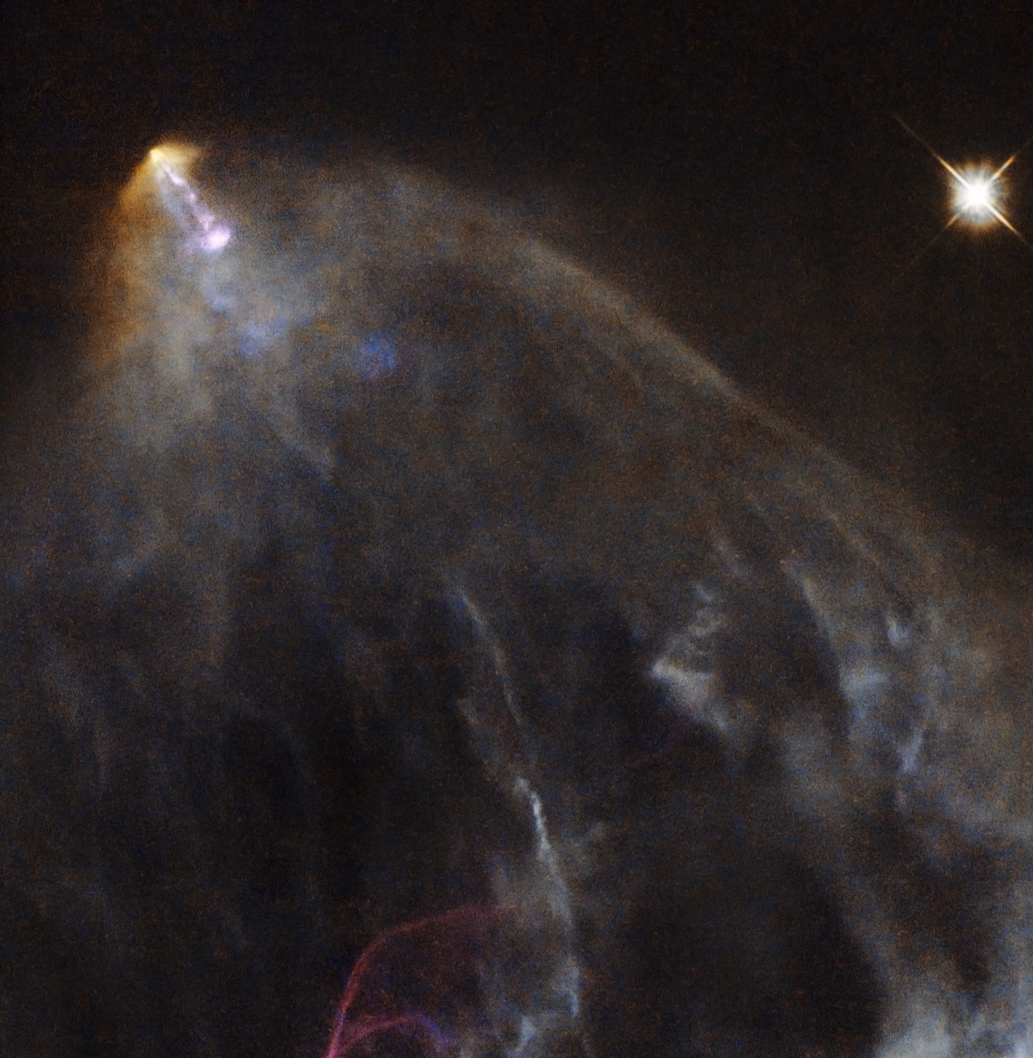

A glowing jet from a young star

This image shows an object known as HH 151, a bright jet of glowing material trailed by an intricate, orange-hued plume of gas and dust. It is located some 460 light-years away in the constellation of Taurus (The Bull), near to the young, tumultuous star HL Tau.

In the first few hundred thousand years of life, new stars like HL Tau pull in material that falls towards them from the surrounding space. This material forms a hot disc that swirls around the coalescing body, launching narrow streams of material from its poles. These jets are shot out at speeds of several hundred kilometres per second and collide violently with nearby clumps of dust and gas, creating wispy, billowing structures known as Herbig-Haro objects — like HH 151 seen in the image above.

Such objects are very common in star-forming regions. They are short-lived, and their motion and evolution can actually be seen over very short timescales, on the order of years. They quickly race away from the newly-forming star that emitted them, colliding with new clumps of material and glowing brightly before fading away.

A version of this image was entered into the Hidden Treasures image processing competition by Gilles Chapdelaine.

Credit: ESA/Hubble & NASA. Acknowledgement: Gilles Chapdelaine